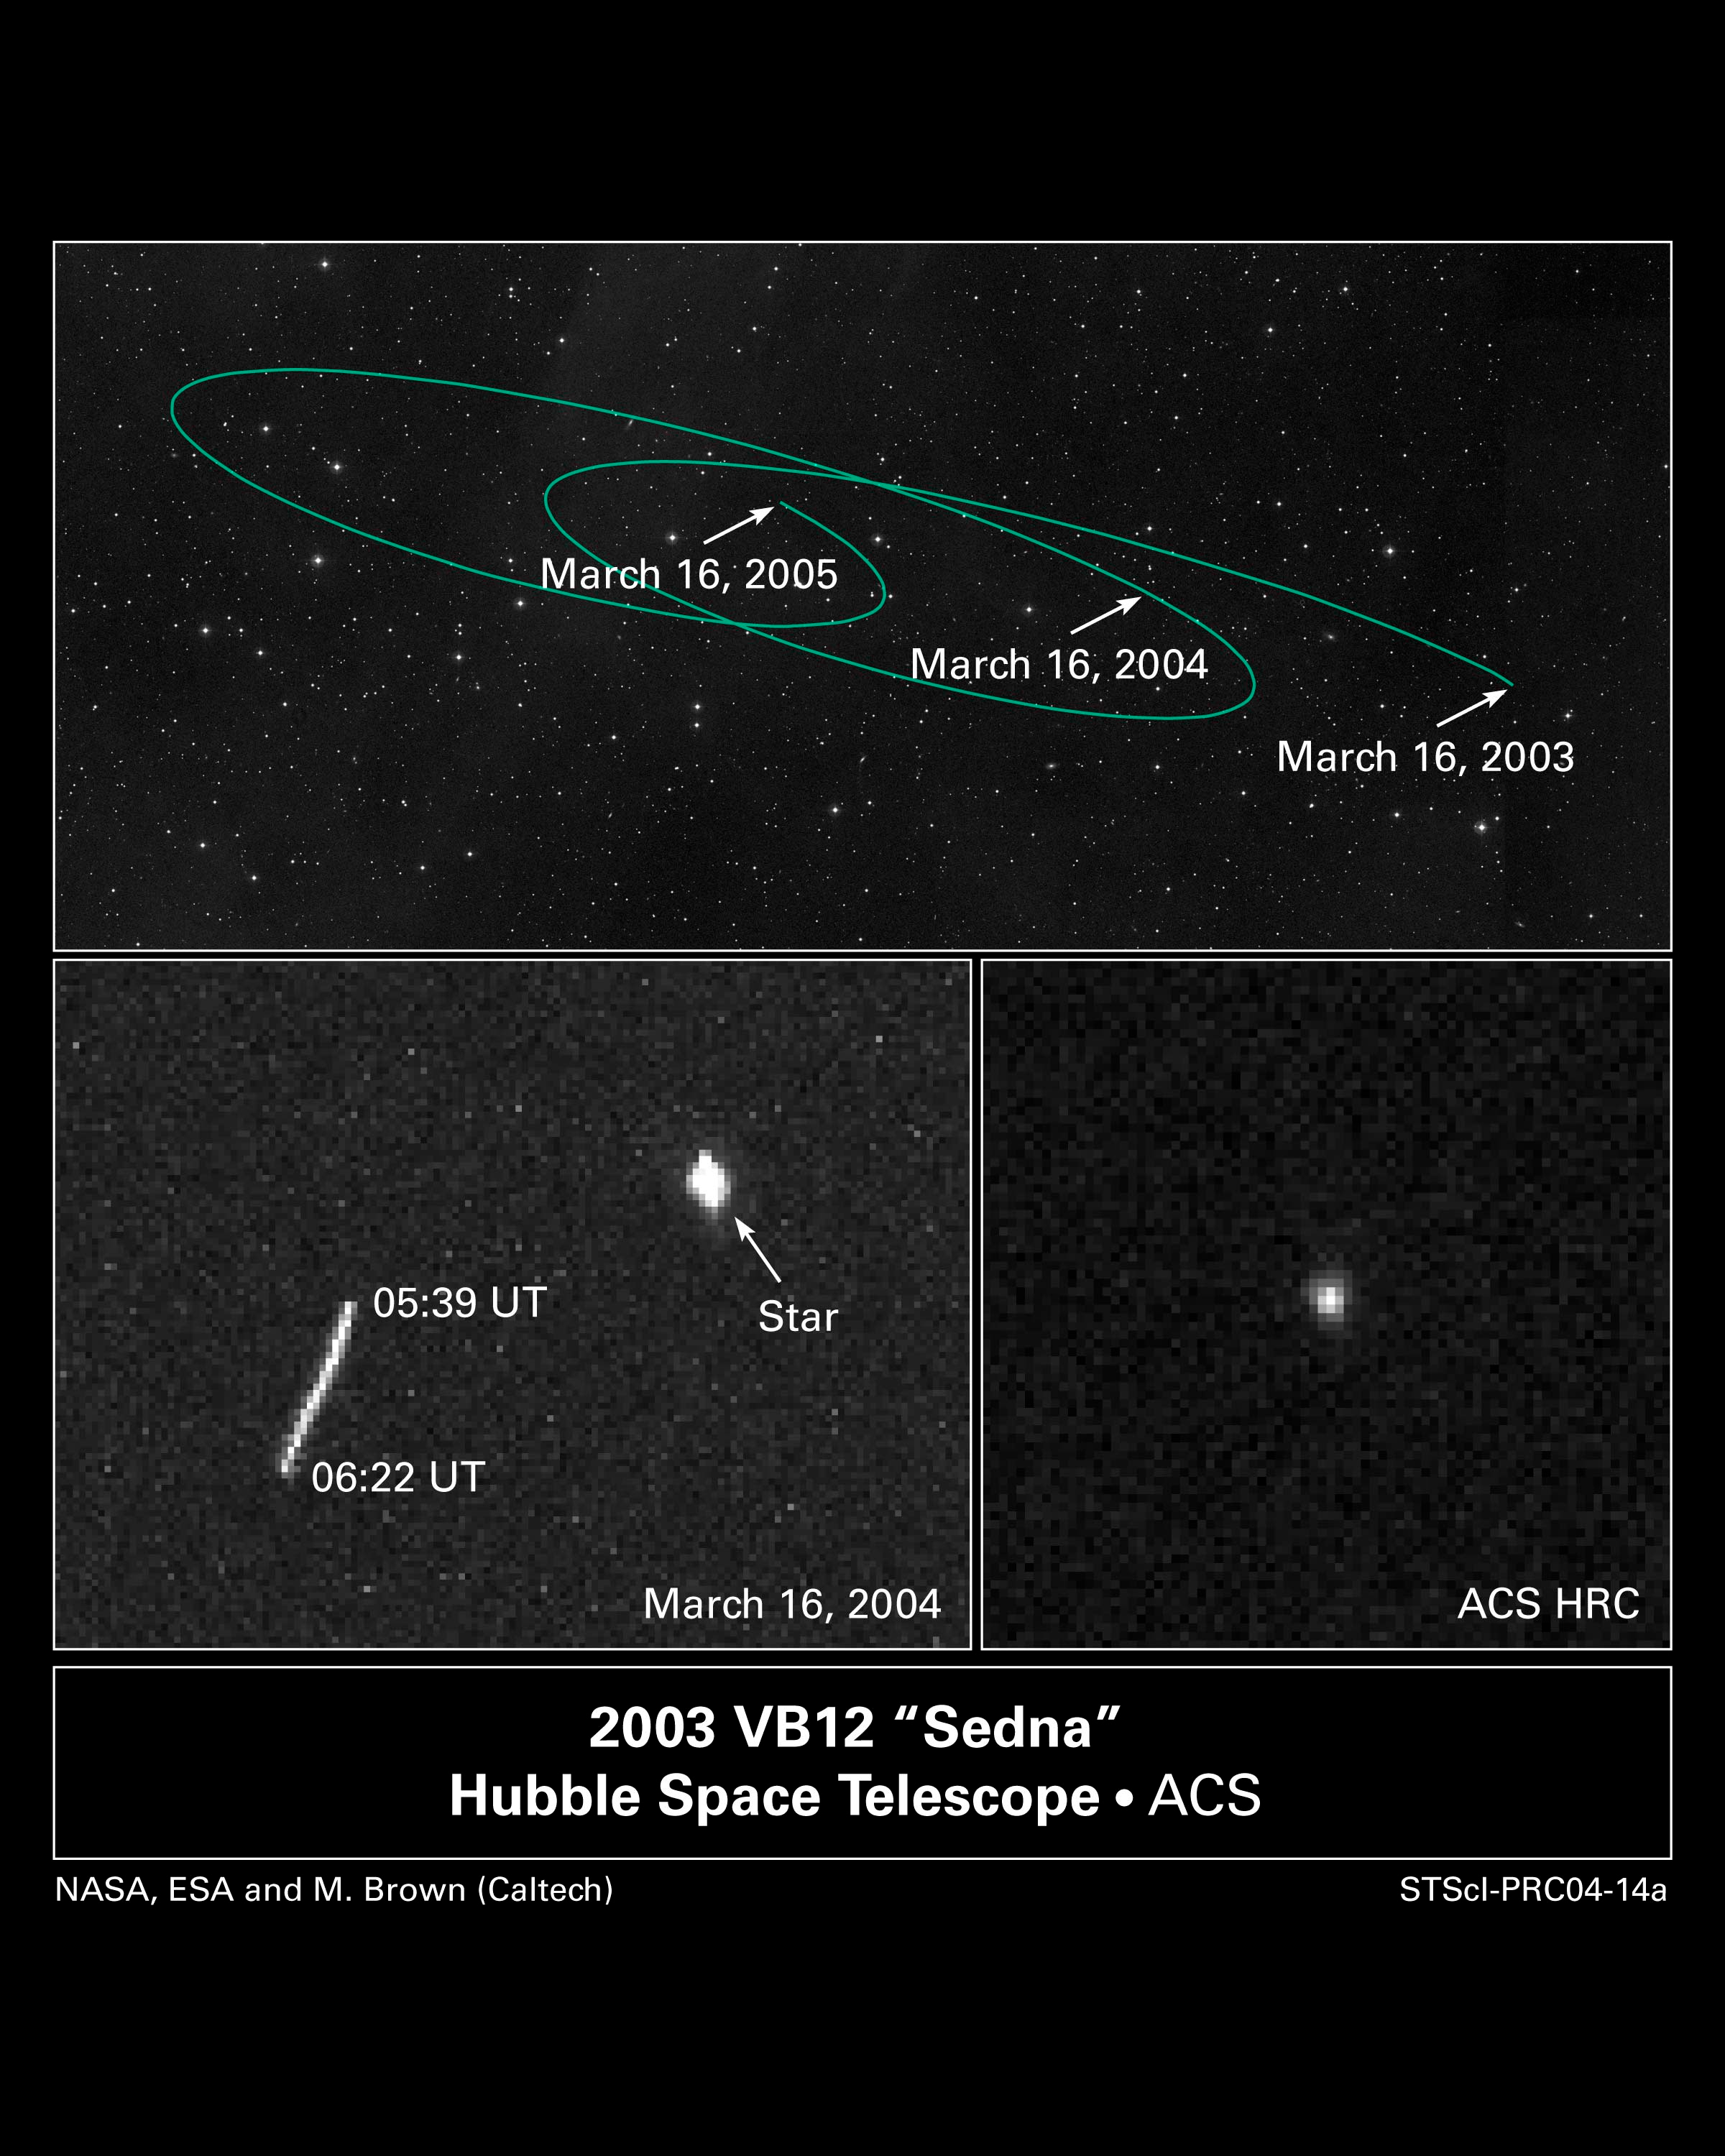

Sedna mystery deepens as Hubble offers best look at farthest planetoid

This is the clearest ever view of the farthest object yet discovered in the solar system. The object is unofficially named "Sedna" (after an Inuit goddess of the sea).

[Lower right]

At a distance of over 8 billion miles (almost 13 billion kilometres), Sedna is so far away it is reduced to one picture element (pixel) in this image taken in high-resolution mode with Hubble's Advanced Camera for Surveys. This image sets an upper limit on Sedna's size of 1,000 miles in diameter. Hubble may just barely be resolving the object. It is surprising that Hubble does not see a suspected moon near the planetoid. Either the moon's not there, or, far less likely, it is being eclipsed by Sedna, or it is transiting Sedna. The gravitational tug of a moon would best explain Sedna's extremely slow rotation of 40 days as inferred from ground-based photometric observations.

[Lower left]

Hubble took a total of 35 images of Sedna on March 16, 2004. The planetoid appeared to move slightly between exposures, due to the motion of Hubble around Earth and the motion of the Earth around the Sun. Sedna, too, is moving through space, but too slowly for that to be seen in these images. The fact that the object shows this parallax shift between exposures demonstrates that Sedna is a member of the solar system, and hence is far closer to the Earth than the background star (at right) in the same field of view.

[Top]

A plot of Sedna's apparent motion through space from 2003 to 2005 easily demonstrates that it is close enough to be part of the solar system. The looping path isn't real, but is caused by the fact that Earth is orbiting the Sun and so "laps" Sedna, like a faster race car, once every year. This gives the illusion that Sedna is briefly moving backward along its orbit. Called retrograde motion, this projection effect was noted by the ancient Greeks as they plotted the periodic backward motion of nearby Mars.

Credit: NASA, ESA and M. Brown (Caltech)